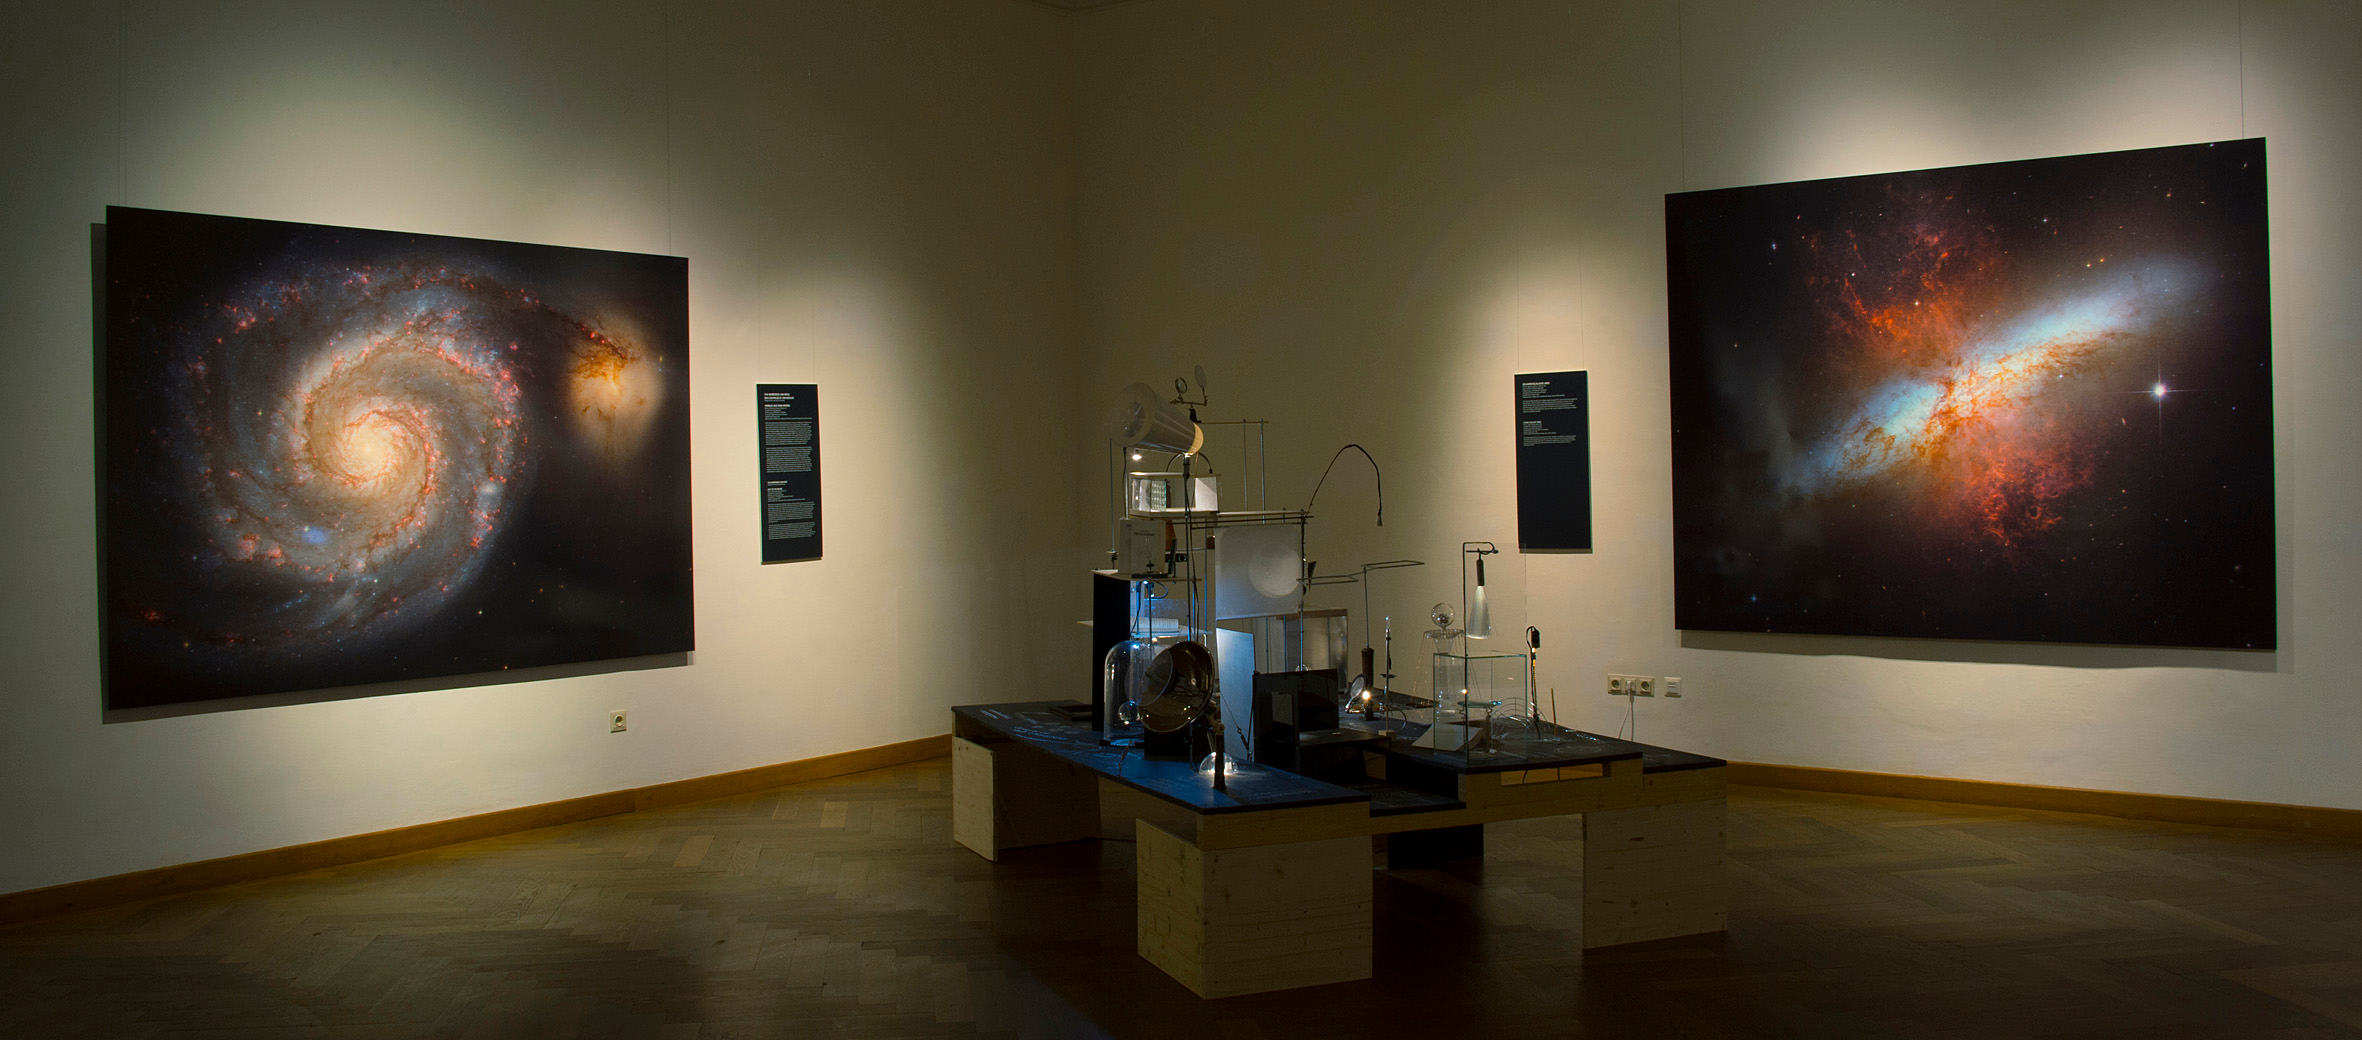

The Mirrored Universe

In the installation The Mirrored Universe, artists Margit Busch and Solmaz Farhang construct a scenario in which a person has disappeared in a completely inexplicable way. Only an enigmatic room, a small alien laboratory filled with strange equipment, was left behind. The only indication of what could have happened are measurements of unusual disturbances of electromagnetic waves in the centre of Vienna.

The installation invites visitors to engage in the fictional story of this person, who apparently worked on nothing less than a reconstruction of the Universe before disappearing.

The installation is part of the Hubble travelling exhibition Our Place in Space.

Credit: NHM Wien, Kurt Kracher